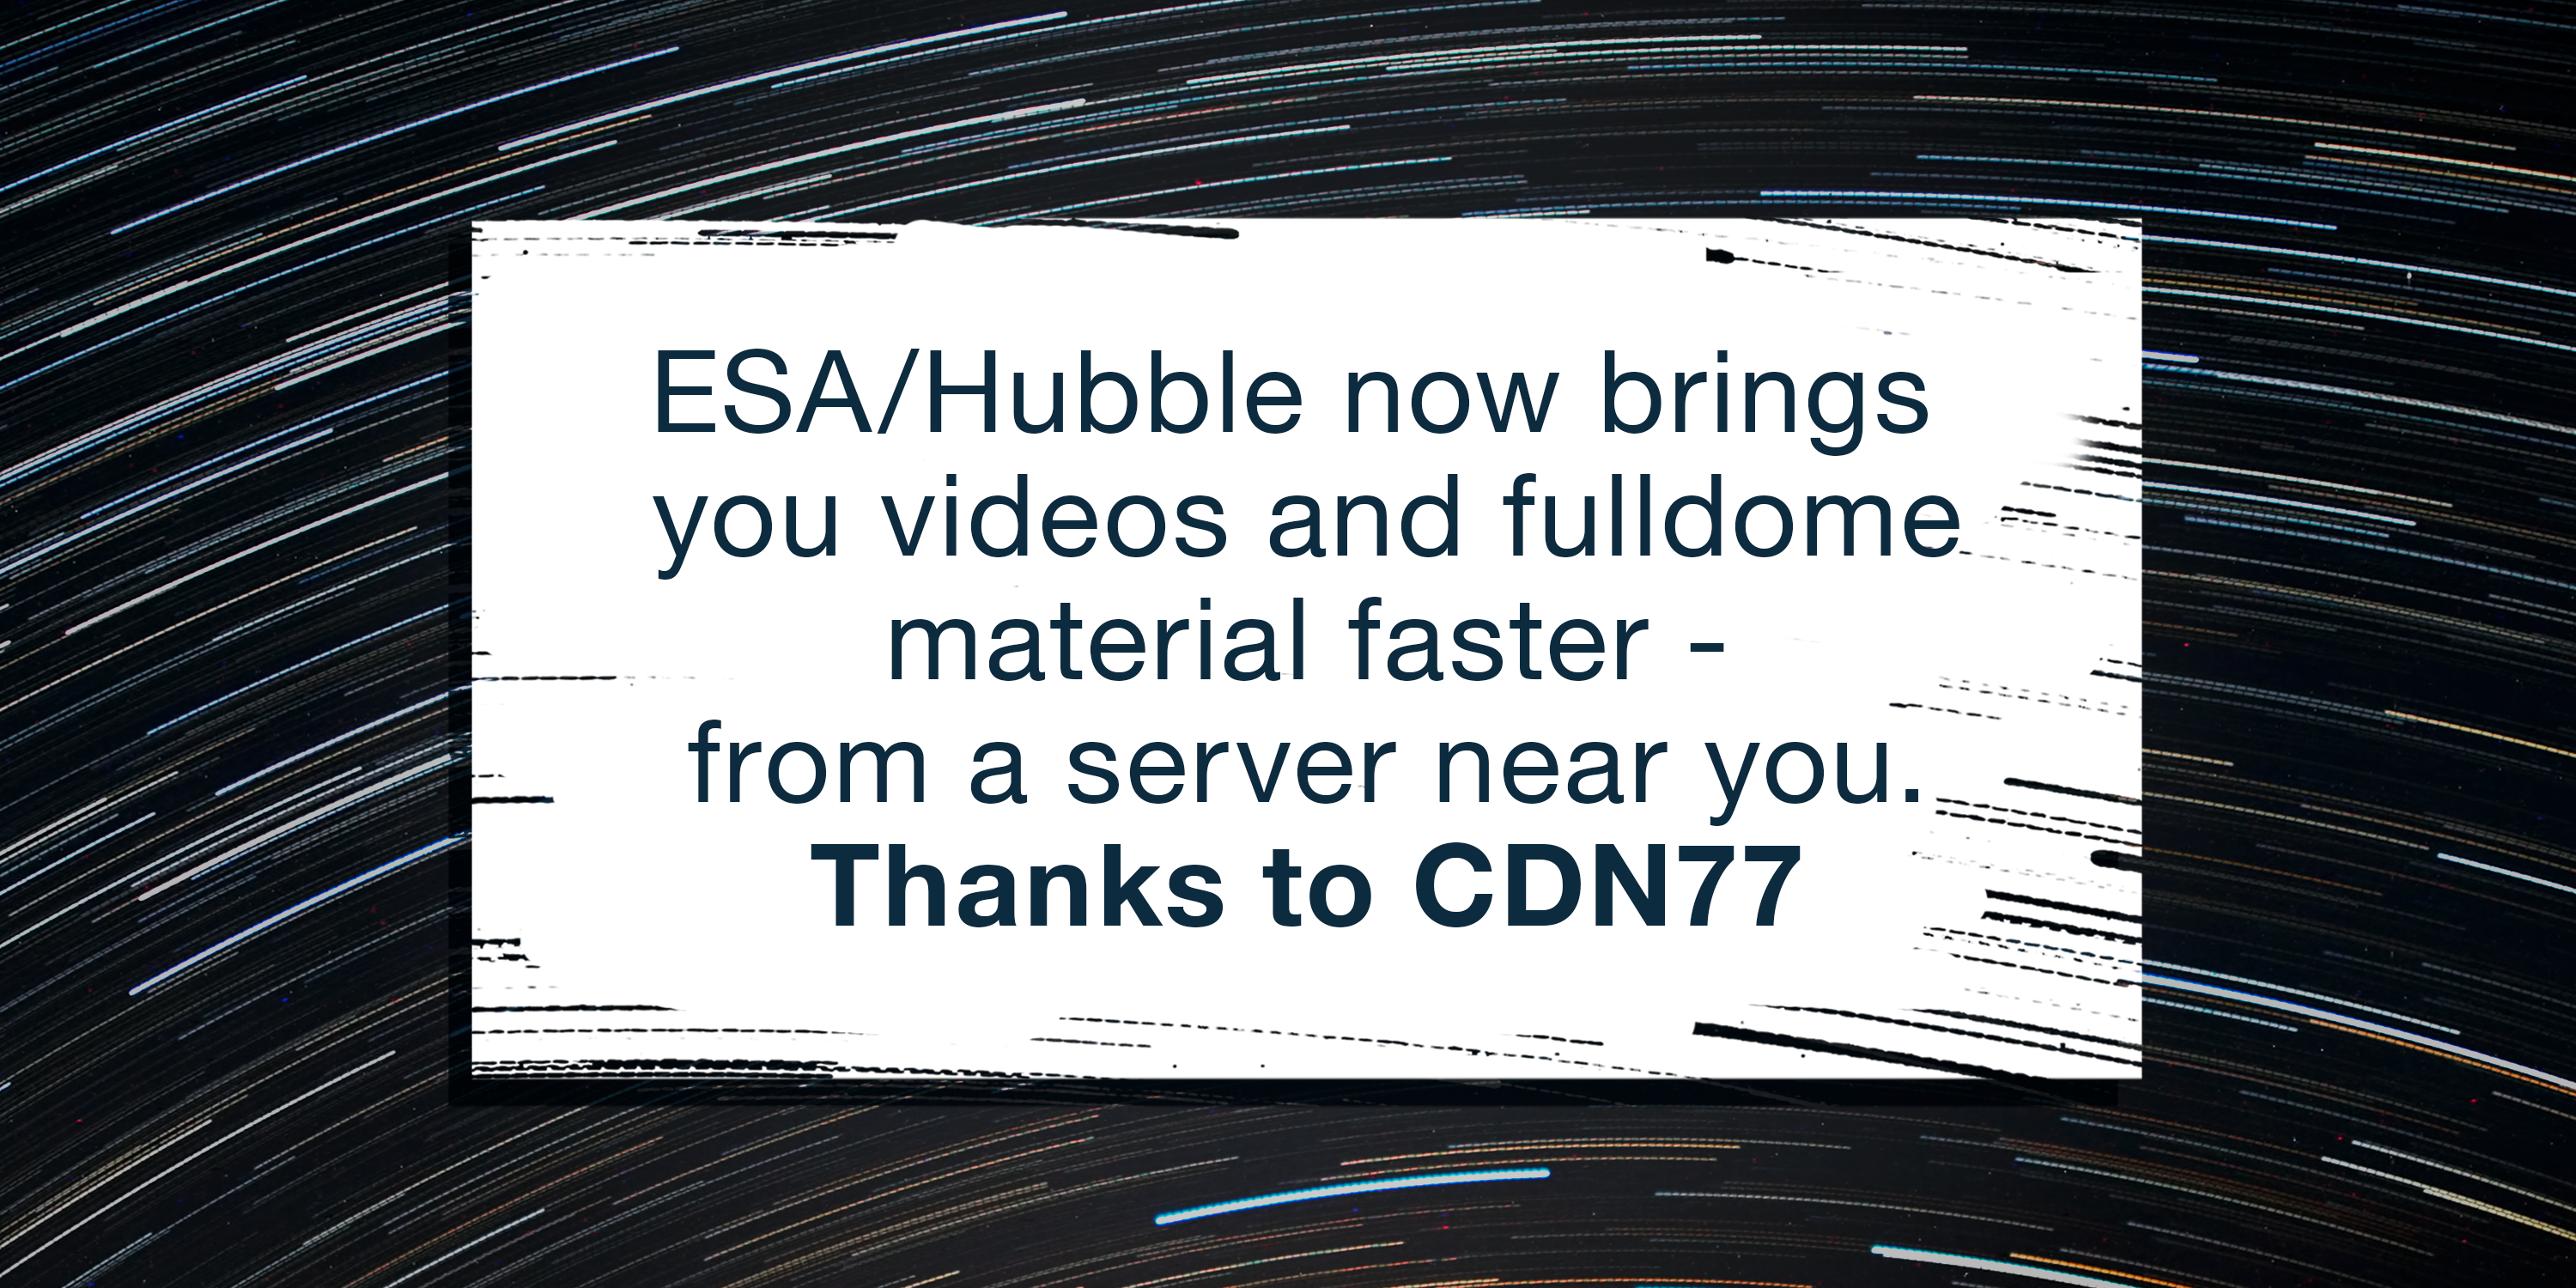

Graphic for ESA/Hubble announcement on delivering content faster

ESA/Hubble now delivers videos and fulldome material faster due to a partnership with a Content Delivery Network (CDN).

Credit: ESA/Hubble